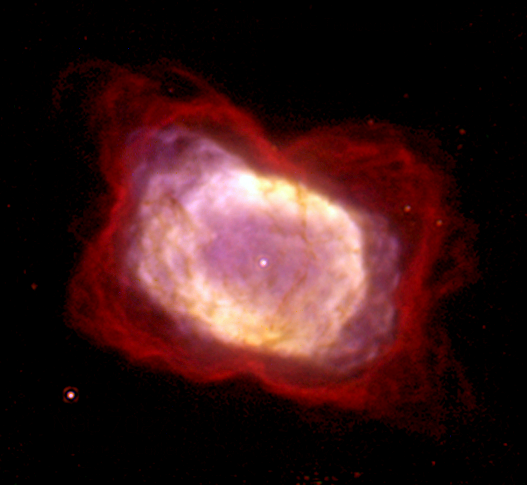

Planetary Nebula NGC 7027

This composite colour image of NGC 7027 is among the first data of a planetary nebula taken with NICMOS. This picture is actually composed of three separate images taken at different wavelengths. The red colour represents cool molecular hydrogen gas, the most abundant gas in the universe.

Credit: William B. Latter (SIRTF Science Center/Caltech) and NASA/ESA